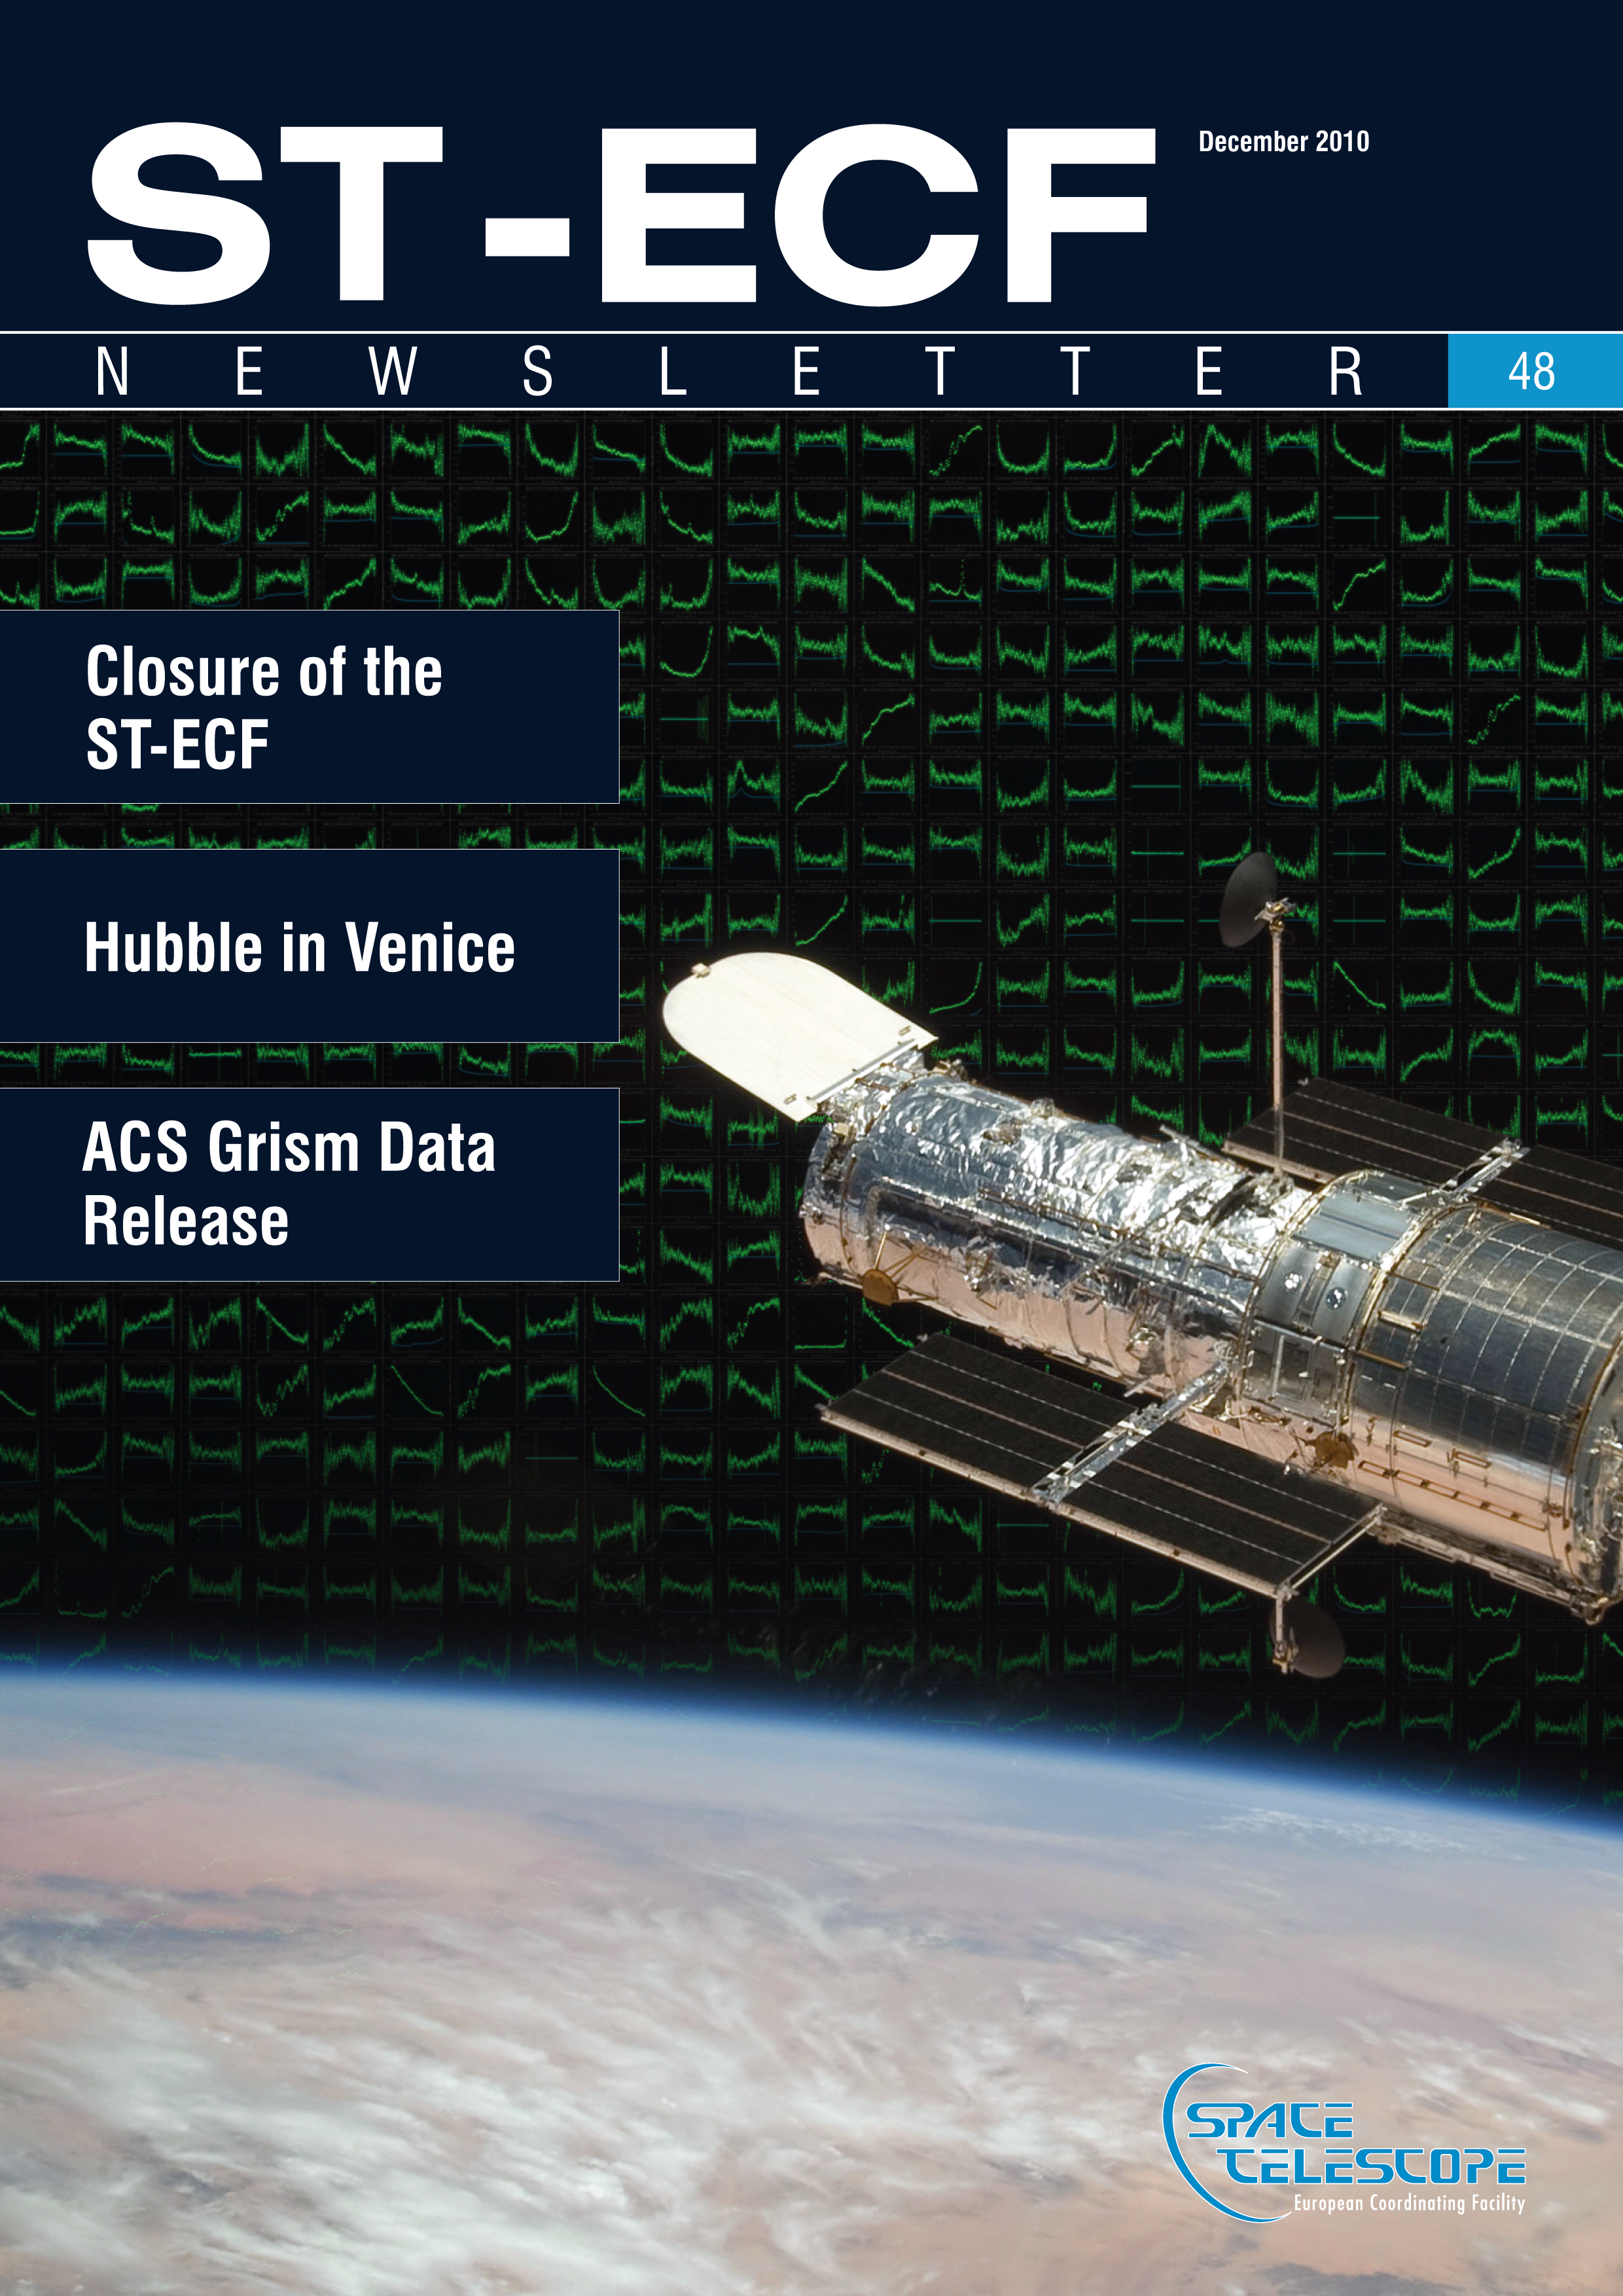

ST-ECF newsletter 48 cover

Cover of item 48 of the ST-ECF Newsletter.

Credit: NASA & ESA